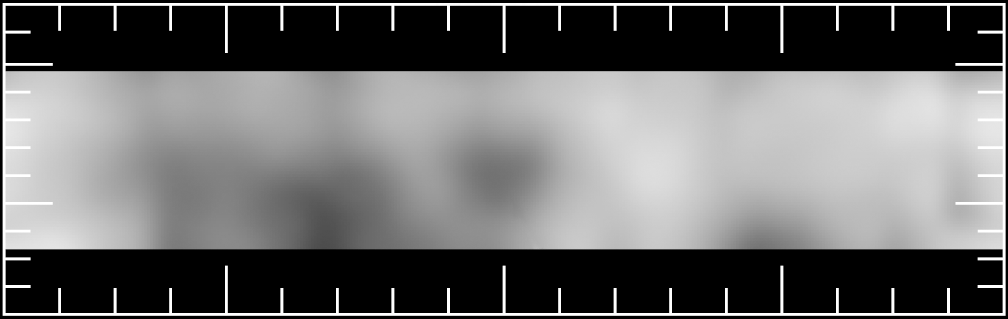

Surface of Asteroid Vesta

Surface Brightness Map of Vesta - This map shows that, unlike most asteroids, Vesta's surface is significantly varied with a dark hemisphere and a light hemisphere.

The surface markings may represent ancient igneous activity such as lava flows and, in addition, regions where major impacts have stripped away the crust revealing mantle material below the crust.

Credit: Ben Zellner (Georgia Southern University) and NASA/ESA